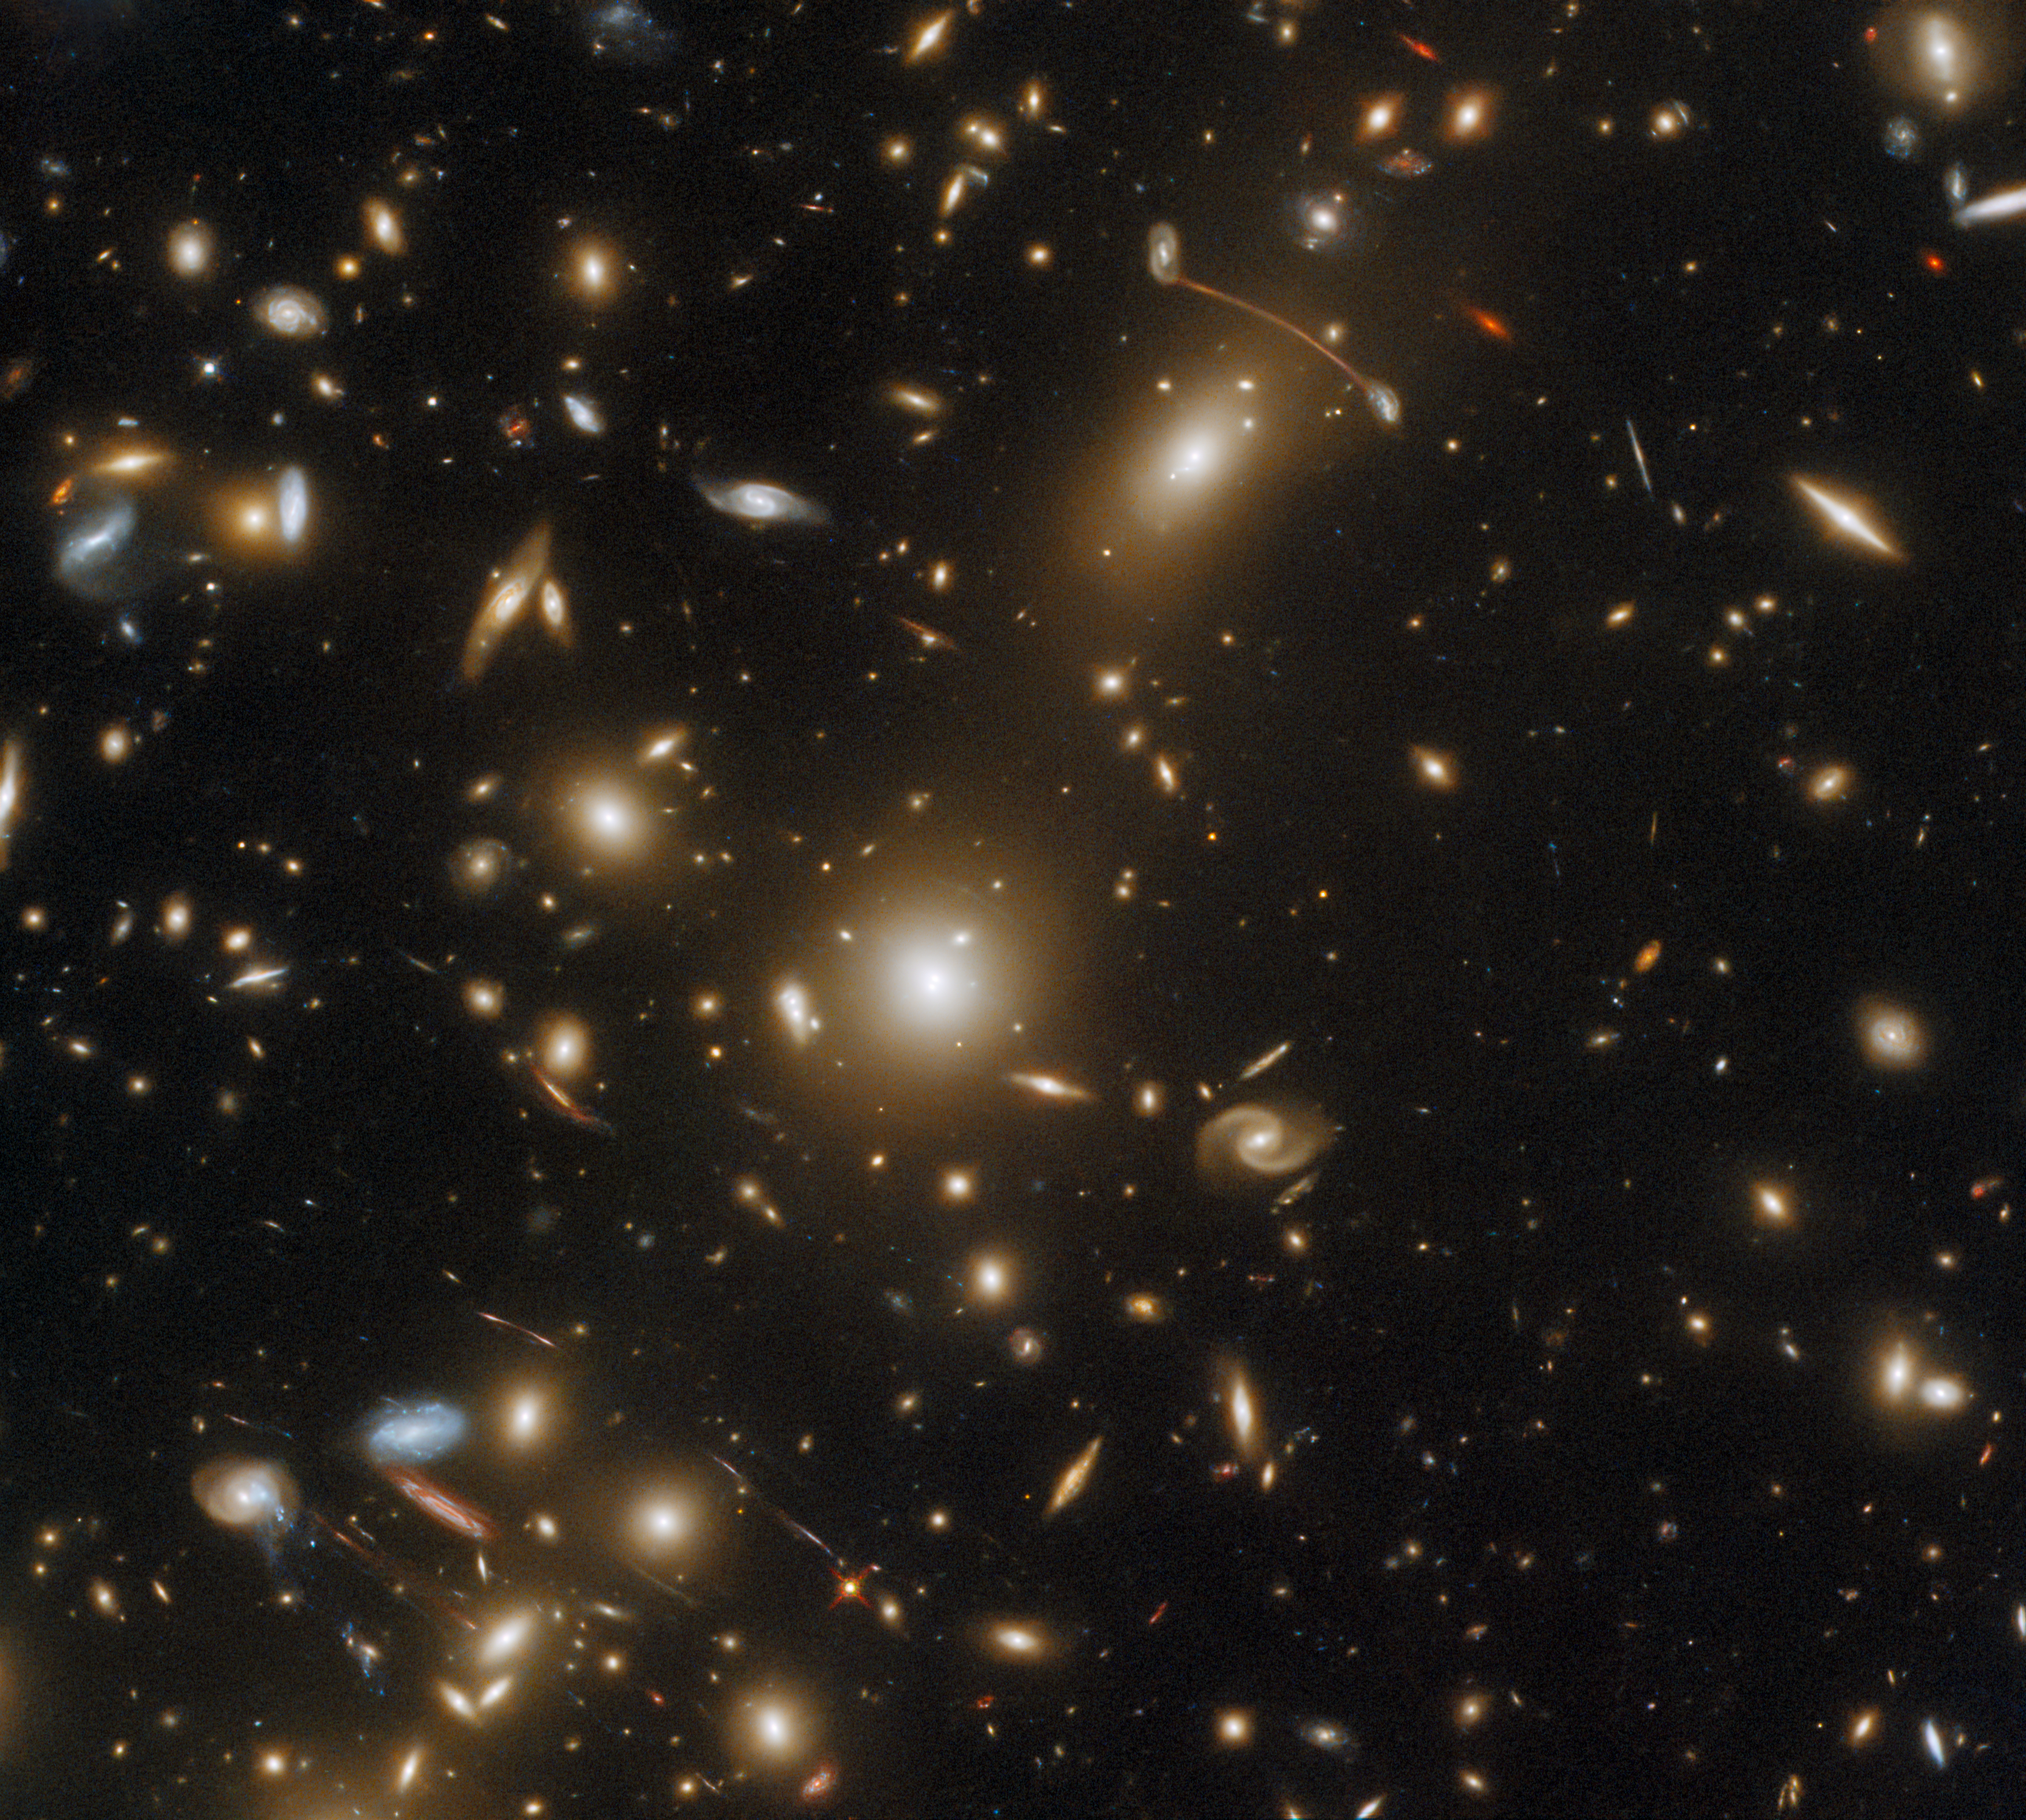

Snapshot of a Massive Cluster

The massive galaxy cluster Abell 1351 is captured in this image by the NASA/ESA Hubble Space Telescope’s Wide Field Camera 3 and Advanced Camera for Surveys. This galaxy cluster lies in the constellation Ursa Major in the northern hemisphere.

This image is filled with streaks of light, which are actually the images of distant galaxies. The streaks are the result of gravitational lensing, an astrophysical phenomenon that occurs when a massive celestial body such as a galaxy cluster distorts spacetime sufficiently strongly to affect the path of light passing through it — almost as if the light were passing through a gigantic lens. Gravitational lensing comes in two varieties — strong and weak — and both can give astronomers an insight into the distribution of mass within a lensing galaxy cluster such as Abell 1351.

This observation is part of an astronomical album comprising snapshots of some of the most massive galaxy clusters. This menagerie of massive clusters demonstrates interesting astrophysical phenomena such as strong gravitational lensing, as well as showcasing spectacular examples of violent galaxy evolution. To obtain this astronomical album, astronomers proposed a Snapshot Program to be slotted into Hubble’s packed observing schedule. These Snapshot Programs are lists of separate, relatively short exposures which can fit into gaps between longer Hubble observations. Having a large pool of Snapshot candidates to dip into allows Hubble to use every second of observing time possible and to maximise the scientific output of the observatory.

Credit: ESA/Hubble & NASA, H. Ebeling Acknowledgement: L. Shatz